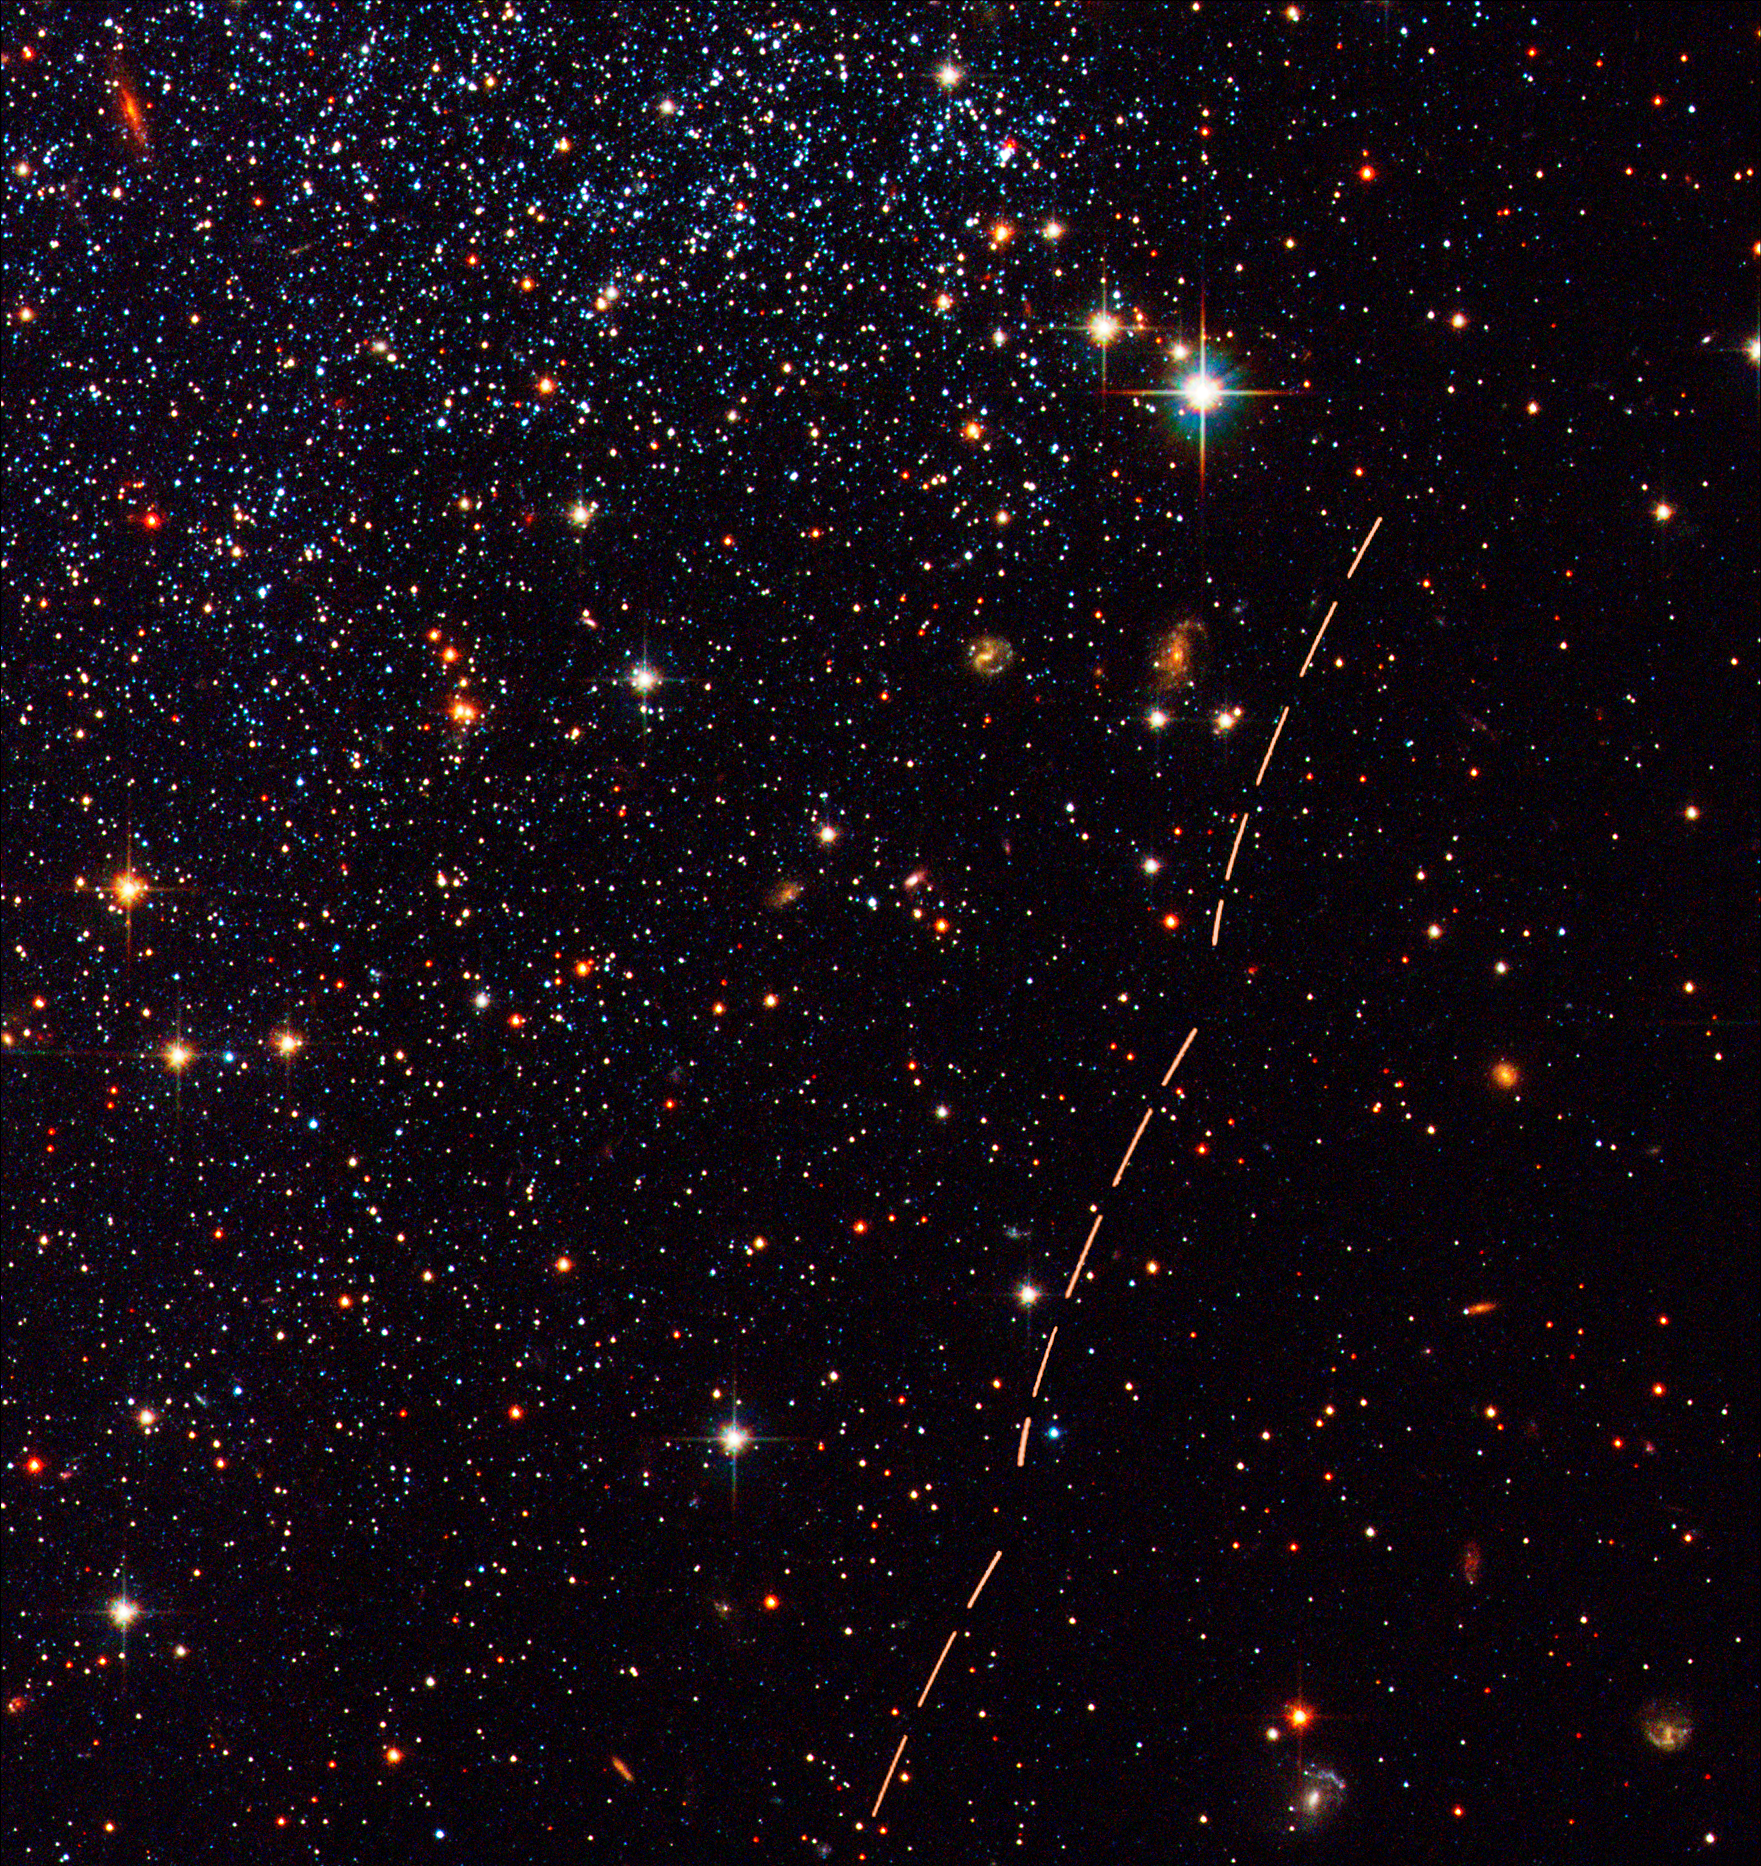

Hubble Tracks Asteroid's Sky Trek

While analyzing NASA/ESA Hubble Space Telescope images of the Sagittarius dwarf irregular galaxy (SagDIG), an international team of astronomers led by Simone Marchi, Yazan Momany, and Luigi Bedin were surprised to see the trail of a faint asteroid that had drifted across the field of view during the exposures. The trail is seen as a series of 13 reddish arcs on the right in this August 2003 Advanced Camera for Surveys image.

Credit: NASA, ESA, and Y. Momany (University of Padua)